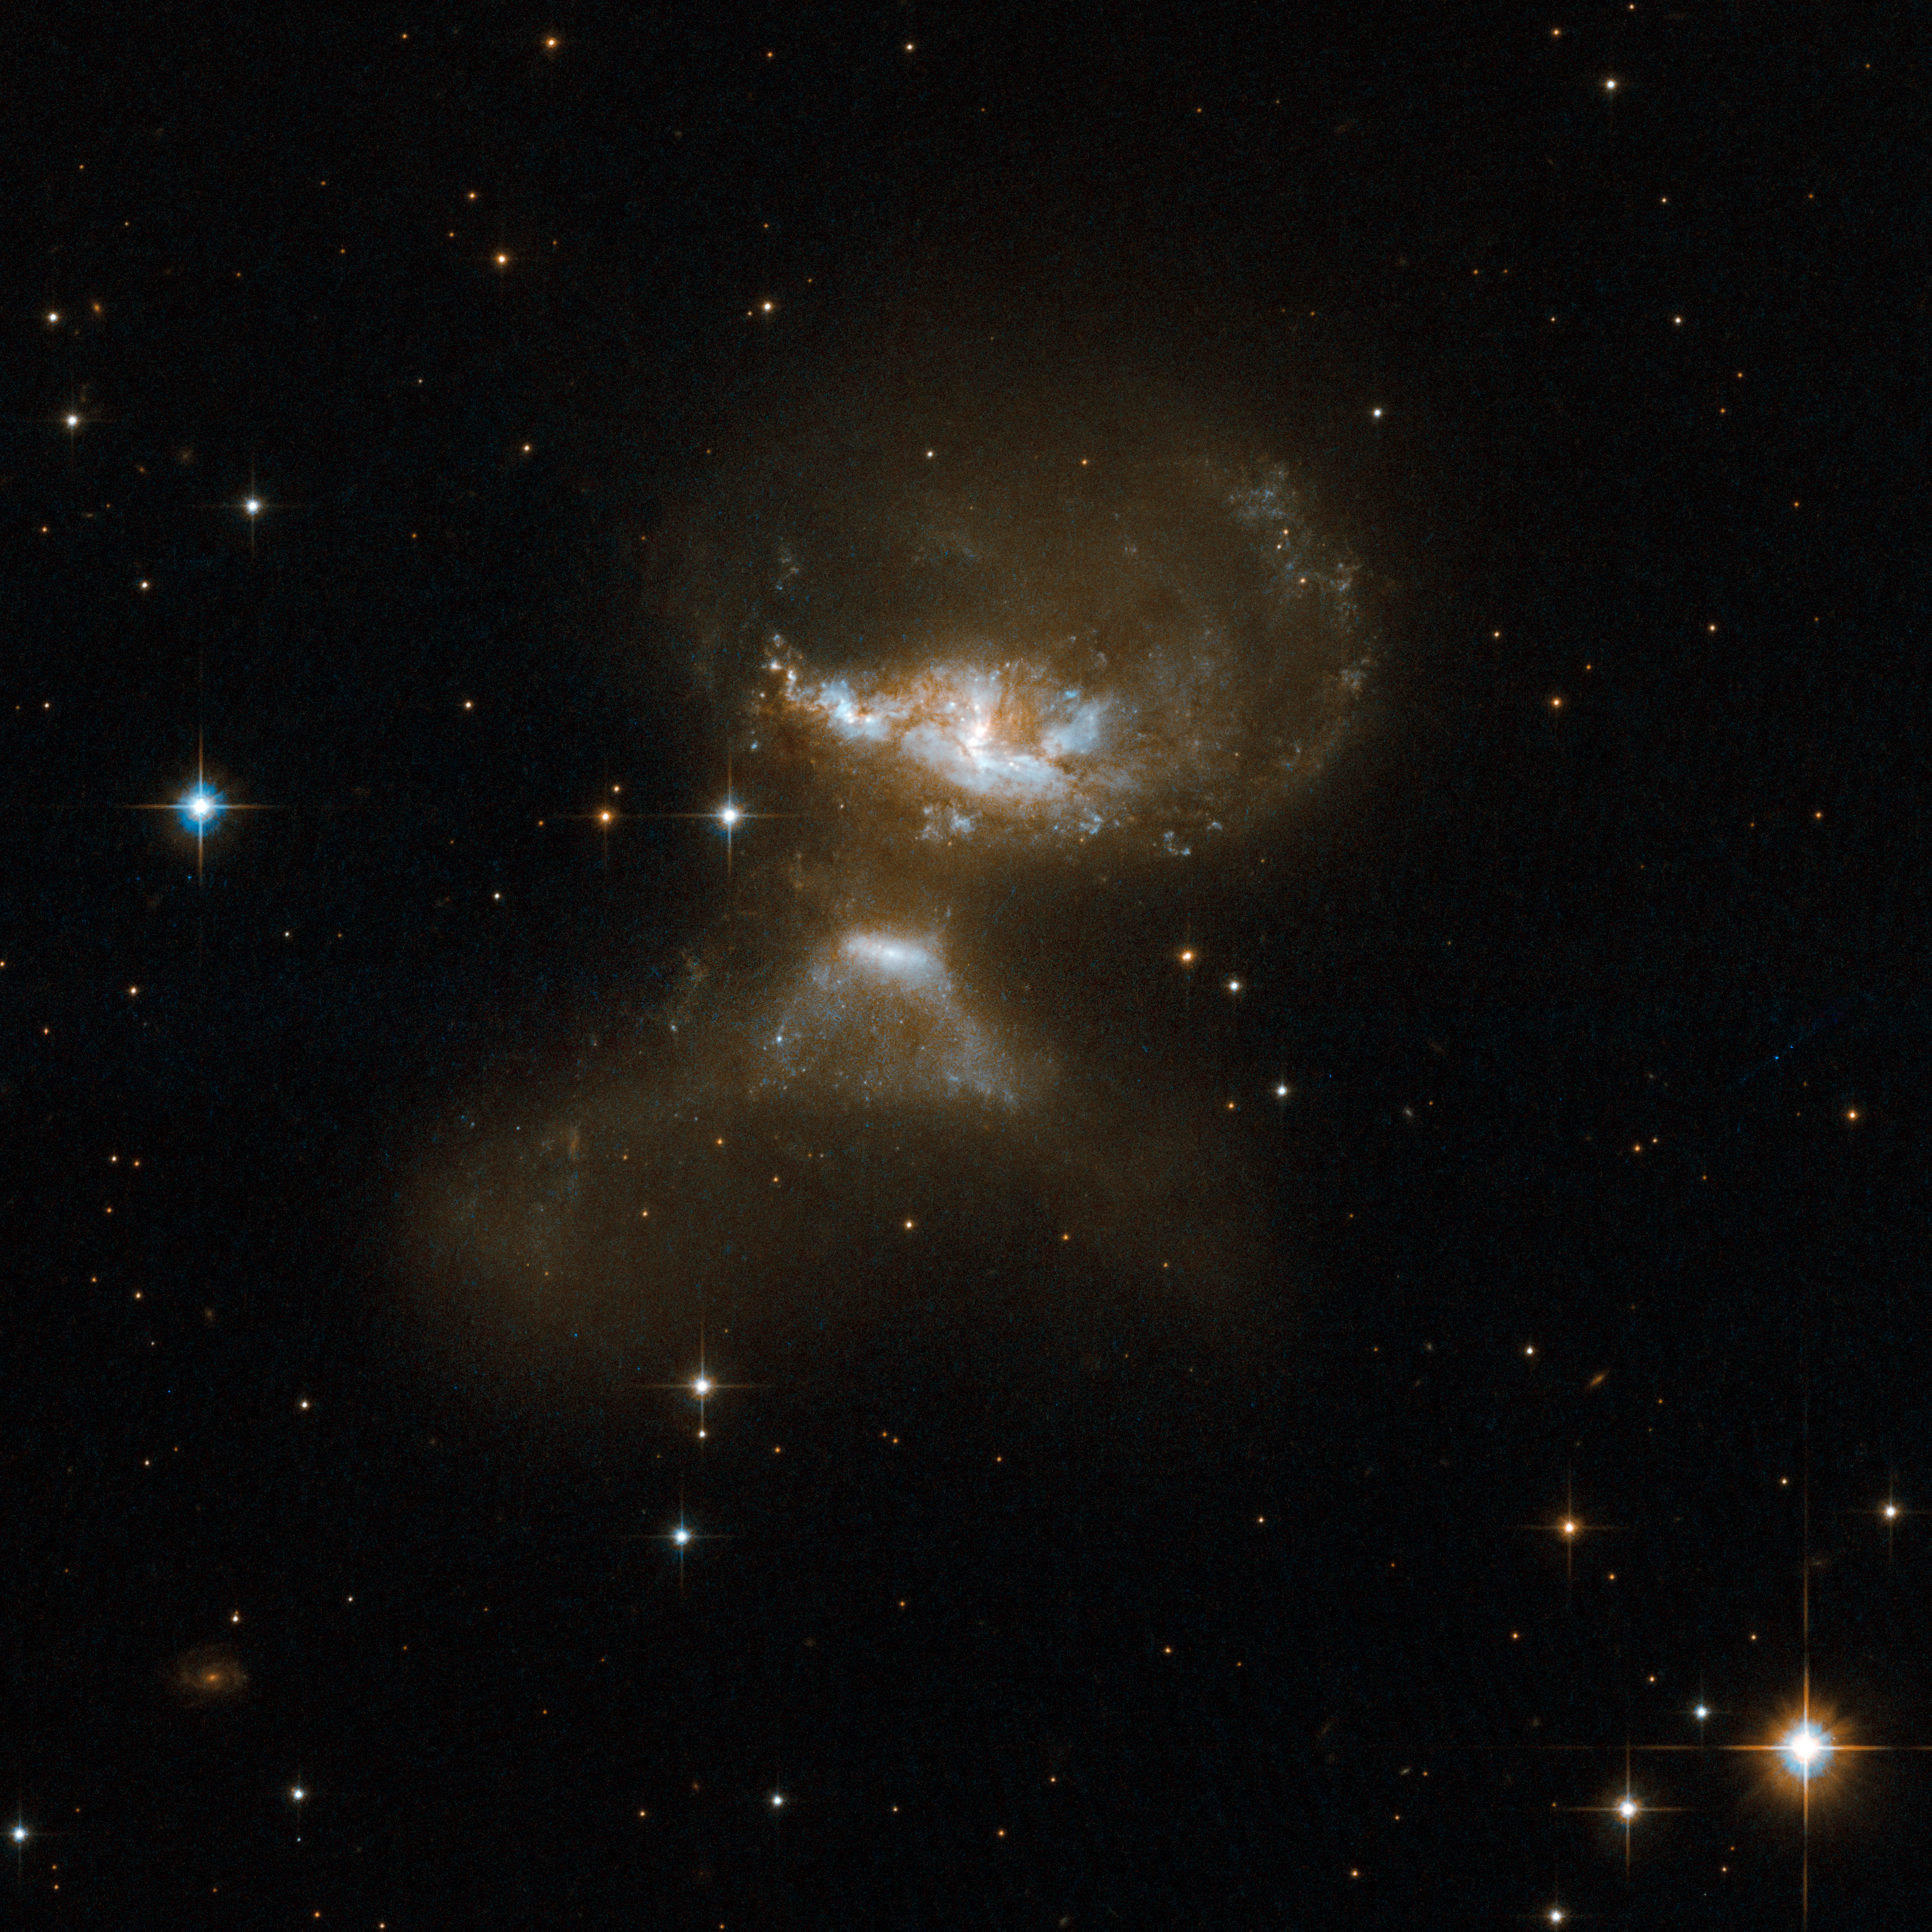

MCG+12-02-001

MCG+12-02-001 consists of a pair of galaxies visibly affected by gravitational interaction as material is flung out in opposite directions. A large galaxy can be seen at the top of the frame and a smaller galaxy resembling an erupting volcano is at the bottom. The bright core of this galaxy emerges from the summit of the "volcano". MCG+12-02-001 is a luminous infrared system that radiates with more than a hundred billion times the luminosity of our Sun. It is located some 200 million light-years away from Earth toward the constellation of Cassiopeia, the Seated Queen.

This image is part of a large collection of 59 images of merging galaxies taken by the Hubble Space Telescope and released on the occasion of its 18th anniversary on 24th April 2008.

Credit: NASA, ESA, the Hubble Heritage Team (STScI/AURA)-ESA/Hubble Collaboration and A. Evans (University of Virginia, Charlottesville/NRAO/Stony Brook University)